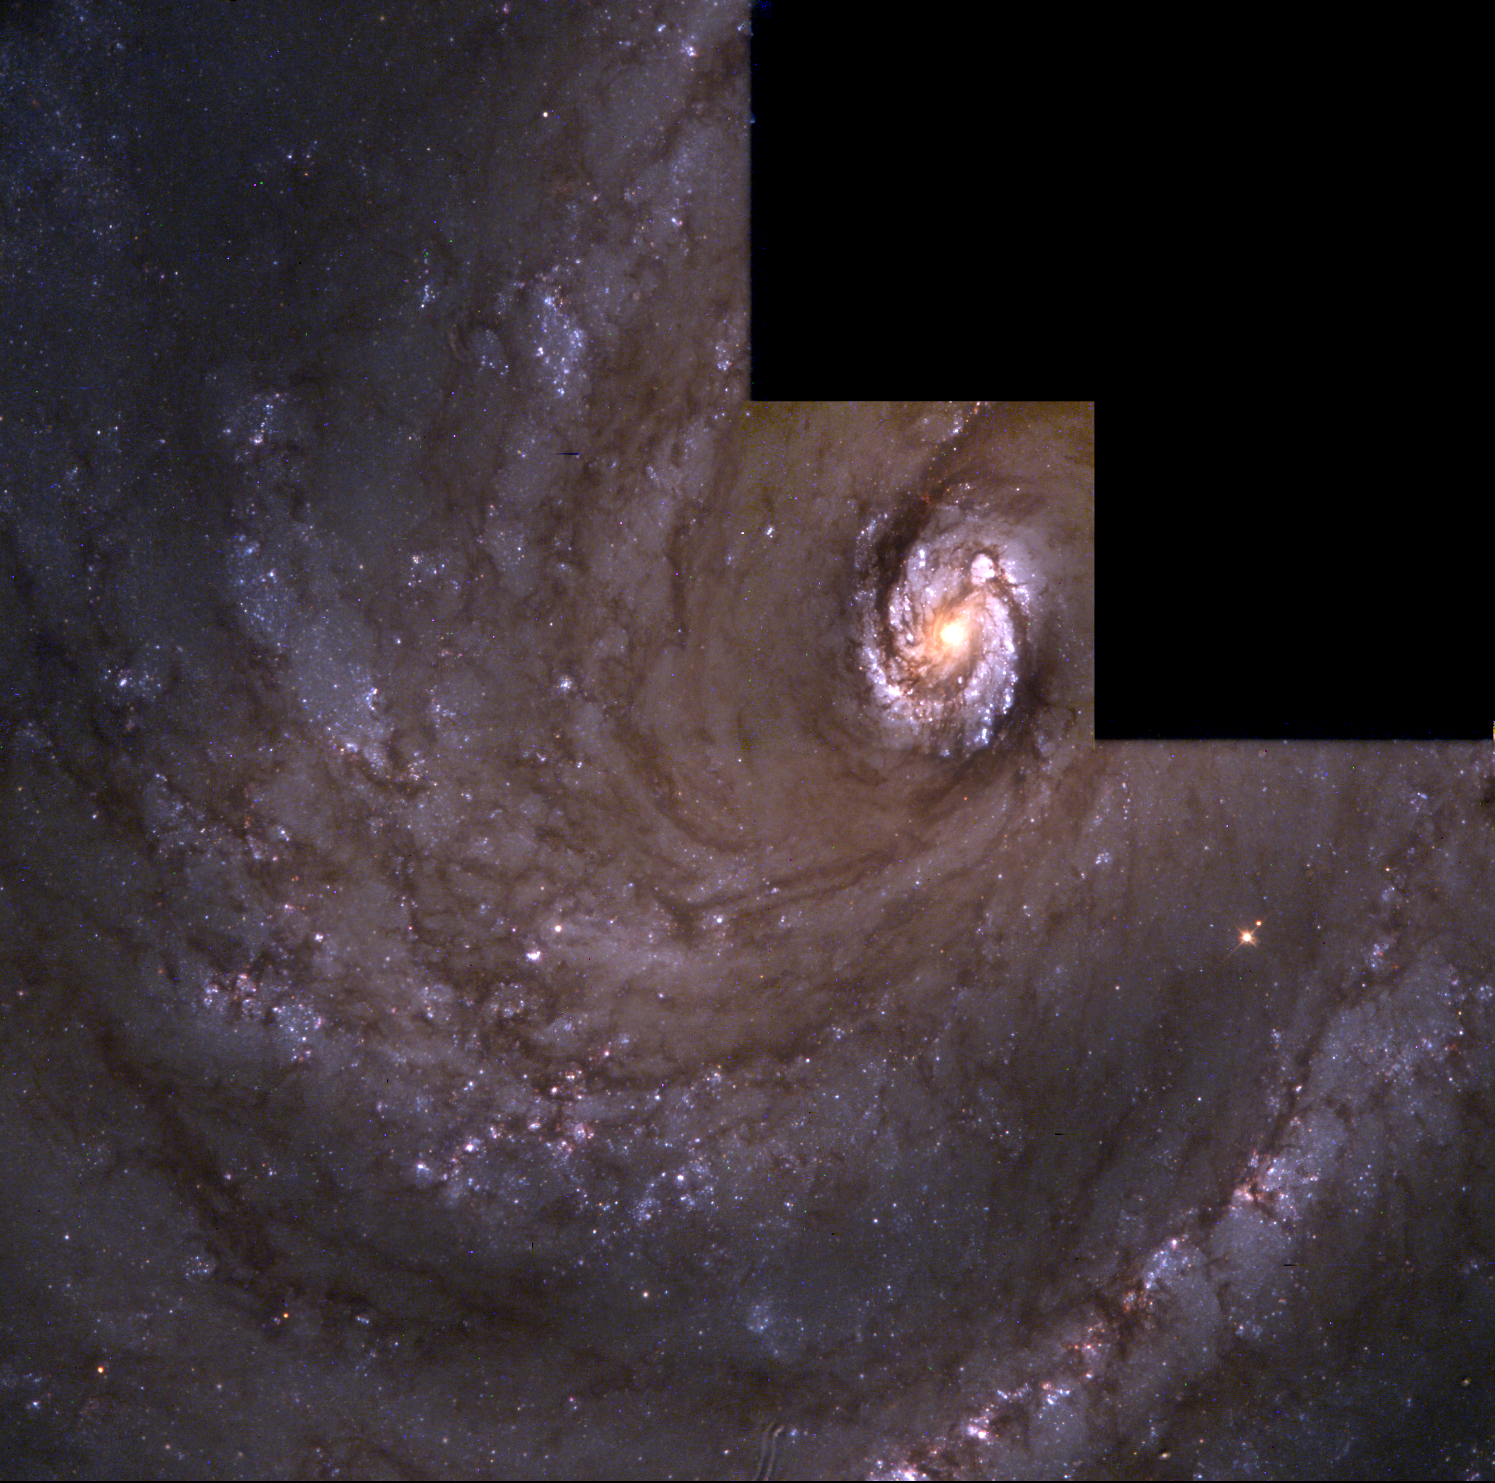

M100 Full Field

This is the grand design spiral galaxy M100 captured with the second generation Wide Field and Planetary Camera (WFPC-2), newly installed in the Hubble Space Telescope. Though the galaxy lies several tens of millions of light-years away, modified optics incorporated within the WFPC-2 allow Hubble to view M100 with a level of clarity and sensitivity previously possible only for the very few nearby galaxies that compose our "Local Group."

Astronomers must study many galaxies in a host of different environments if they are to come to understand how our own galaxy, our star, and our earth came to be. By expanding the region of the universe that can be studied in such detail a thousand fold, the WFPC-2 will help the Hubble Space Telescope to fulfill this mission.

Credit: NASA & ESA